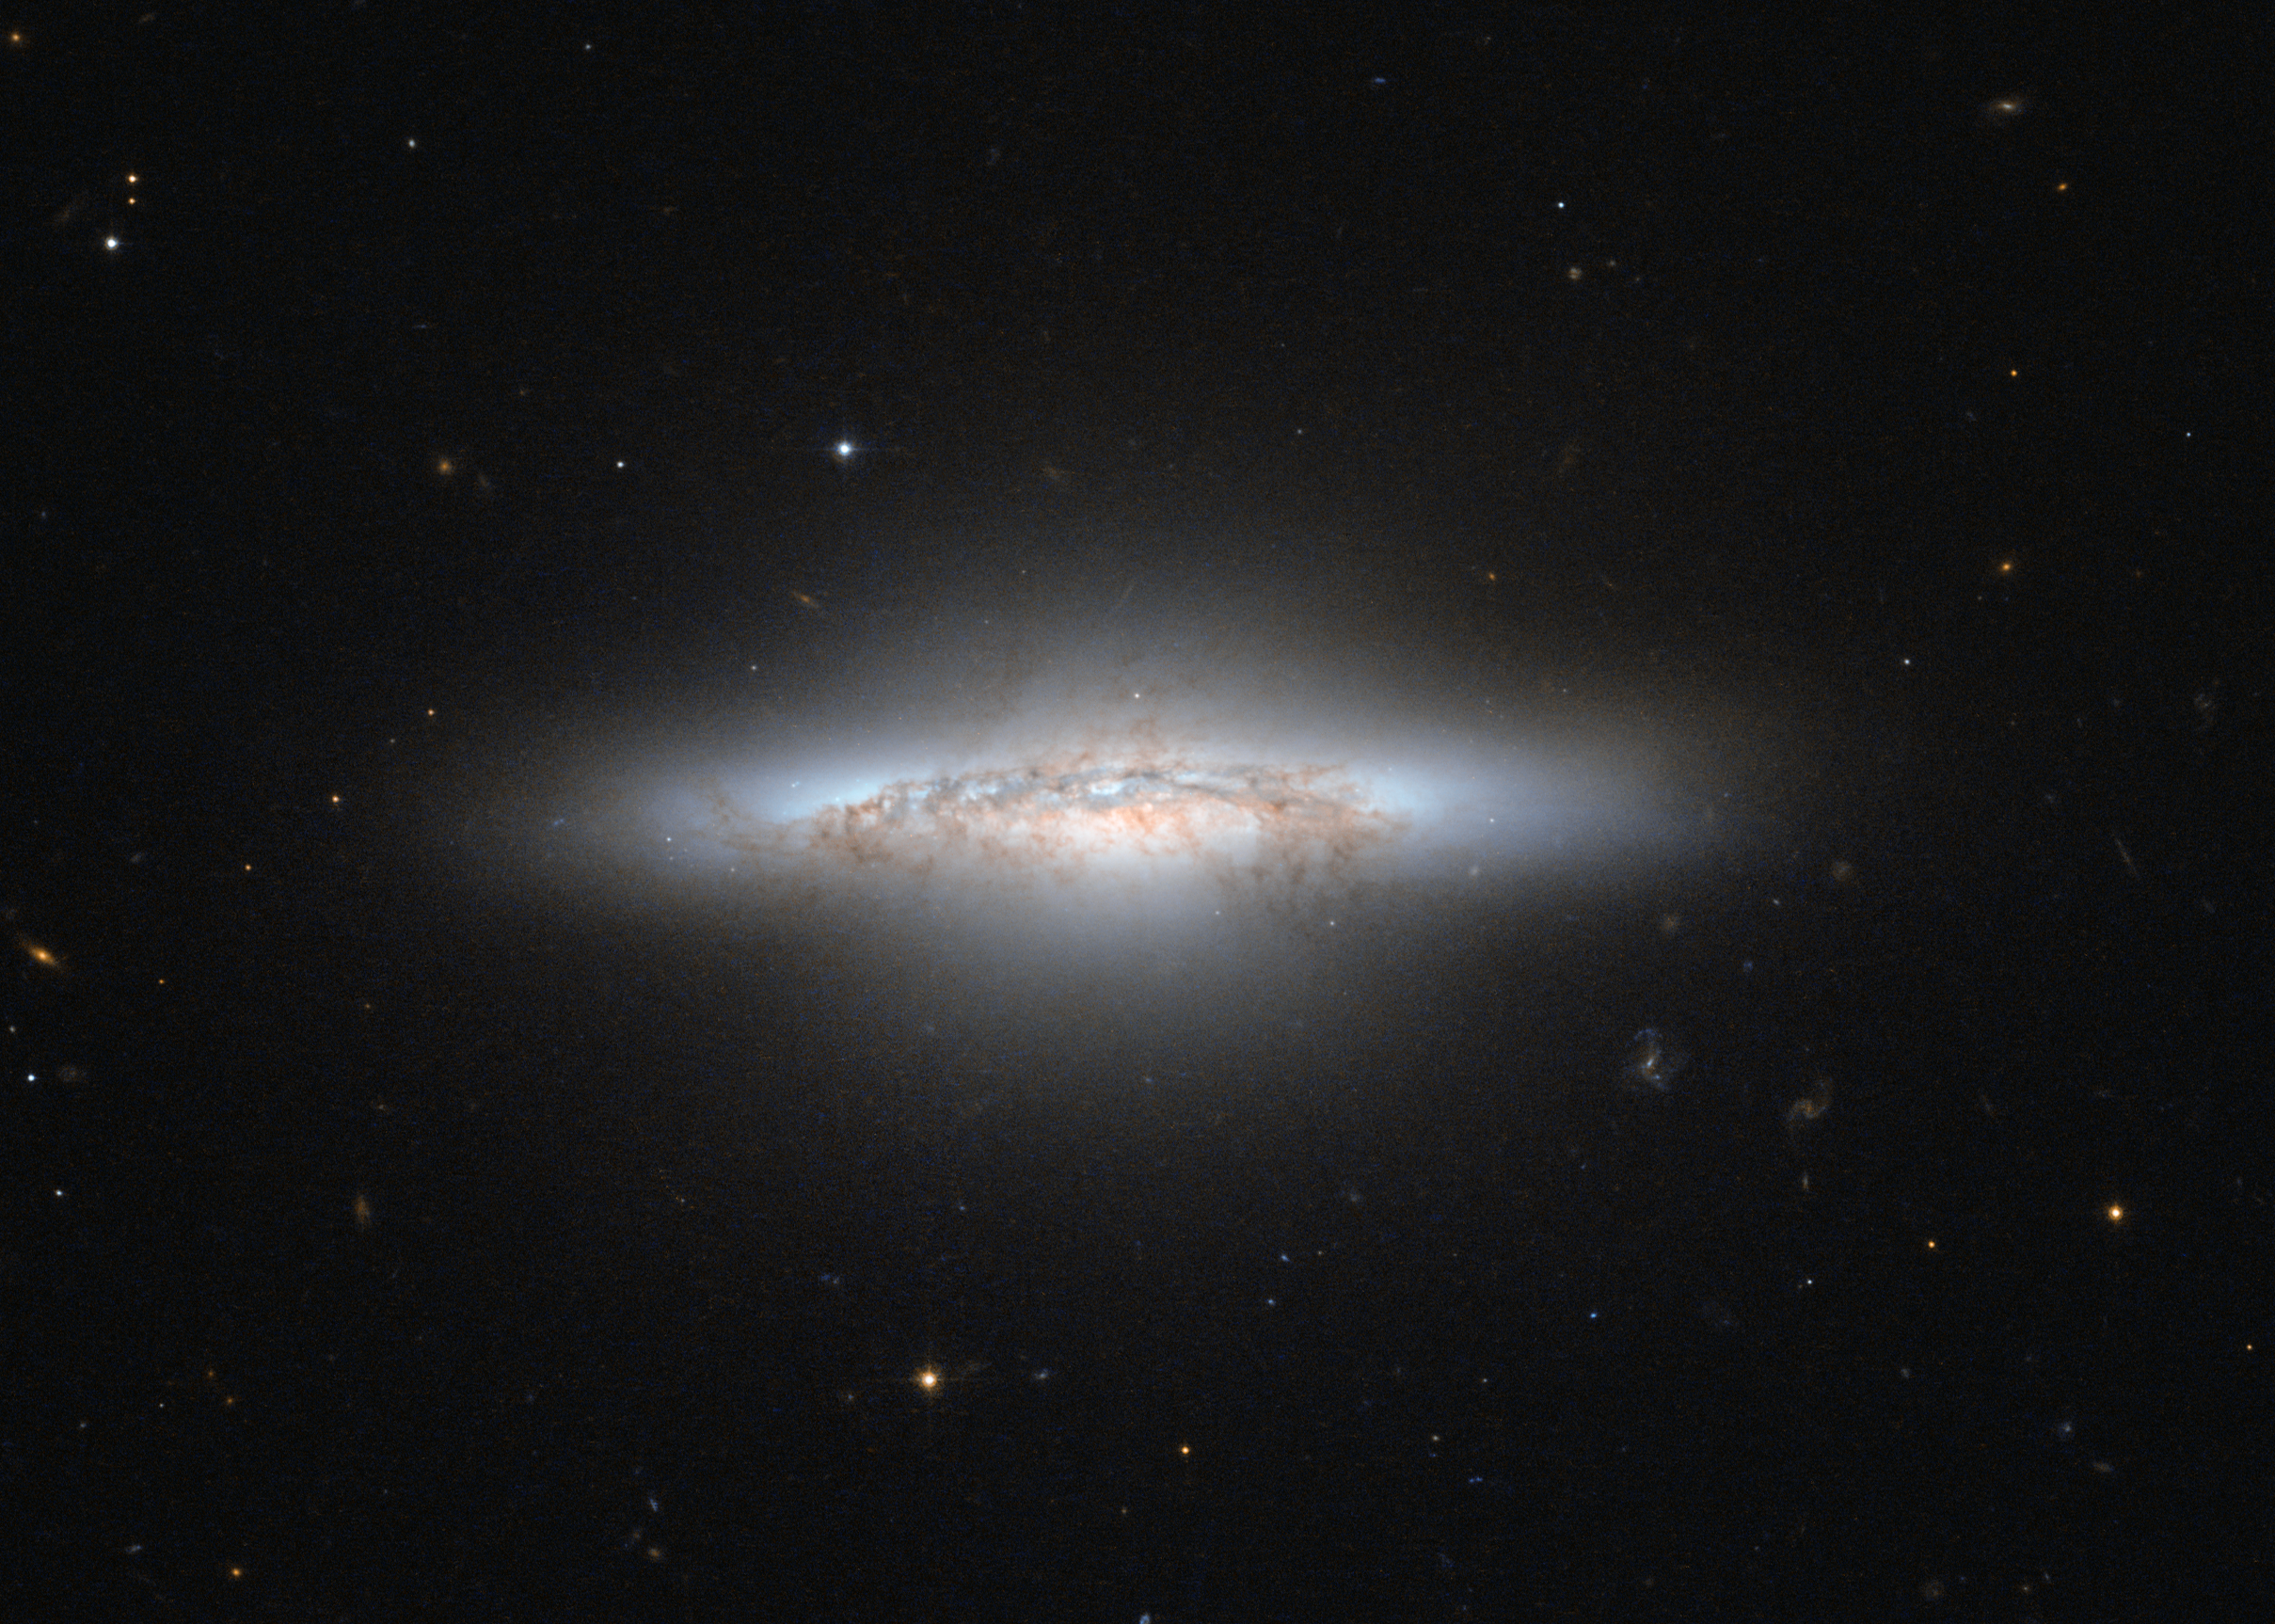

A galaxy colourfully waning

The NASA/ESA Hubble Space Telescope has captured a beautiful galaxy that, with its reddish and yellow central area, looks rather like an explosion from a Hollywood movie. The galaxy, called NGC 5010, is in a period of transition. The aging galaxy is moving on from life as a spiral galaxy, like our Milky Way, to an older, less defined type called an elliptical galaxy. In this in-between phase, astronomers refer to NGC 5010 as a lenticular galaxy, which has features of both spirals and ellipticals.

NGC 5010 is located around 140 million light-years away in the constellation of Virgo (The Virgin). The galaxy is oriented sideways to us, allowing Hubble to peer into it and show the dark, dusty, remnant bands of spiral arms. NGC 5010 has notably started to develop a big bulge in its disc as it takes on a more rounded shape.

Most of the stars in NGC 5010 are red and elderly. The galaxy no longer contains all that many of the fast-lived blue stars common in younger galaxies that still actively produce new populations of stars.

Much of the dusty and gaseous fuel needed to create fresh stars has already been used up in NGC 5010. Overt time, the galaxy will grow progressively more "red and dead”, as astronomers describe elliptical galaxies.

Hubble's Advanced Camera for Surveys (ACS) snapped this image in violet and infrared light.

Credit: ESA/Hubble & NASA